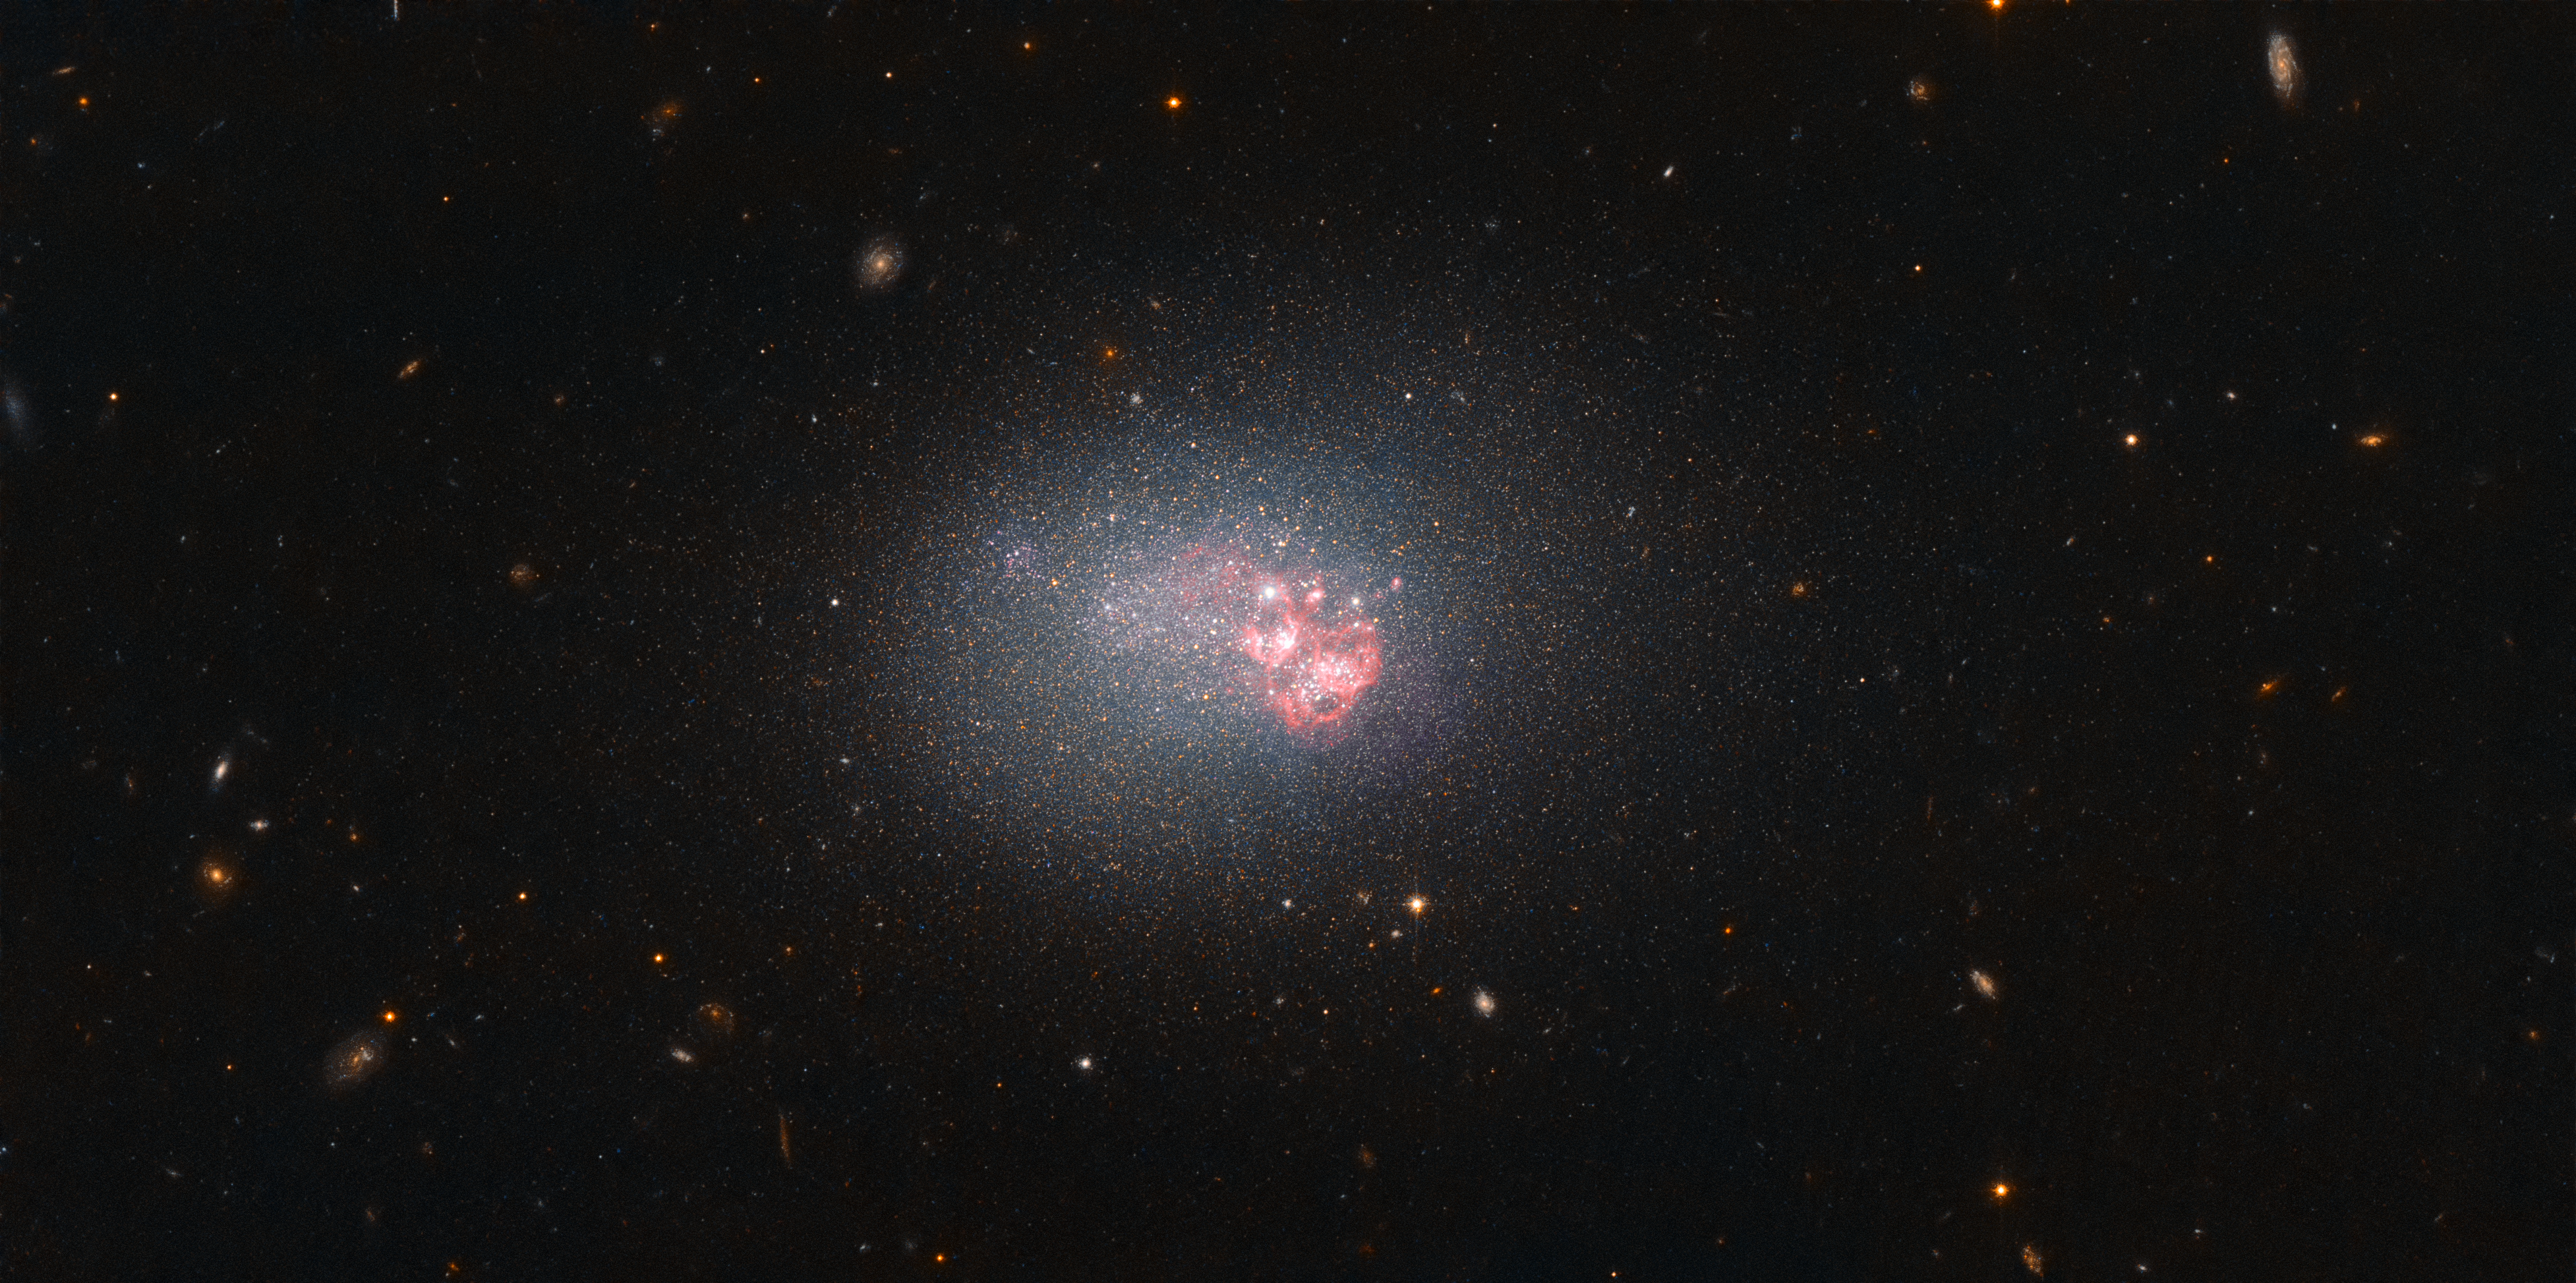

Size can be deceptive

As far as galaxies are concerned, size can be deceptive. Some of the largest galaxies in the Universe are dormant, while some dwarf galaxies, such as ESO 553-46 imaged here by the NASA/ESA Hubble Space Telescope, can produce stars at a hair-raising rate. In fact, ESO 553-46 has one of the highest rates of star formation of the 1000 or so galaxies nearest to the Milky Way. No mean feat for such a diminutive galaxy!

Clusters of young, hot stars are speckling the galaxy, burning with a fierce blue glow. The intense radiation they produce also causes surrounding gas to light up, which is bright red in this image. The small mass and distinctive colouring of galaxies of this type prompted astronomers to classify them, appropriately, as blue compact dwarfs (BCD).

Lacking the clear core and structure that many larger galaxies — such as the Milky Way — have, BCDs such as ESO 553-46 are composed of many large clusters of stars bound together by gravity. Their chemical makeup is interesting to astronomers, since they contain relatively little dust and few elements heavier than helium, which are produced in stars and distributed via supernova explosions. Such conditions are strikingly similar to those that existed in the early Universe, when the first galaxies were beginning to form.

Credit: ESA/Hubble & NASA